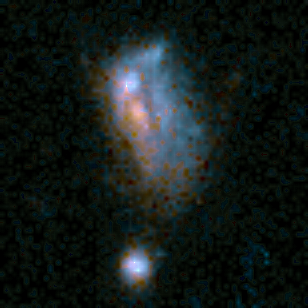

Medium Deep Survey Galaxy

Image of a normal spiral galaxy taken by the Wide Field Planetary Camera 2 (WFPC2) installed on the Hubble Space Telescope (HST). The object is estimated to be at a distance of 5 to 7 billion light-years from Earth.

Credit: Richard Griffiths (JHU) and NASA